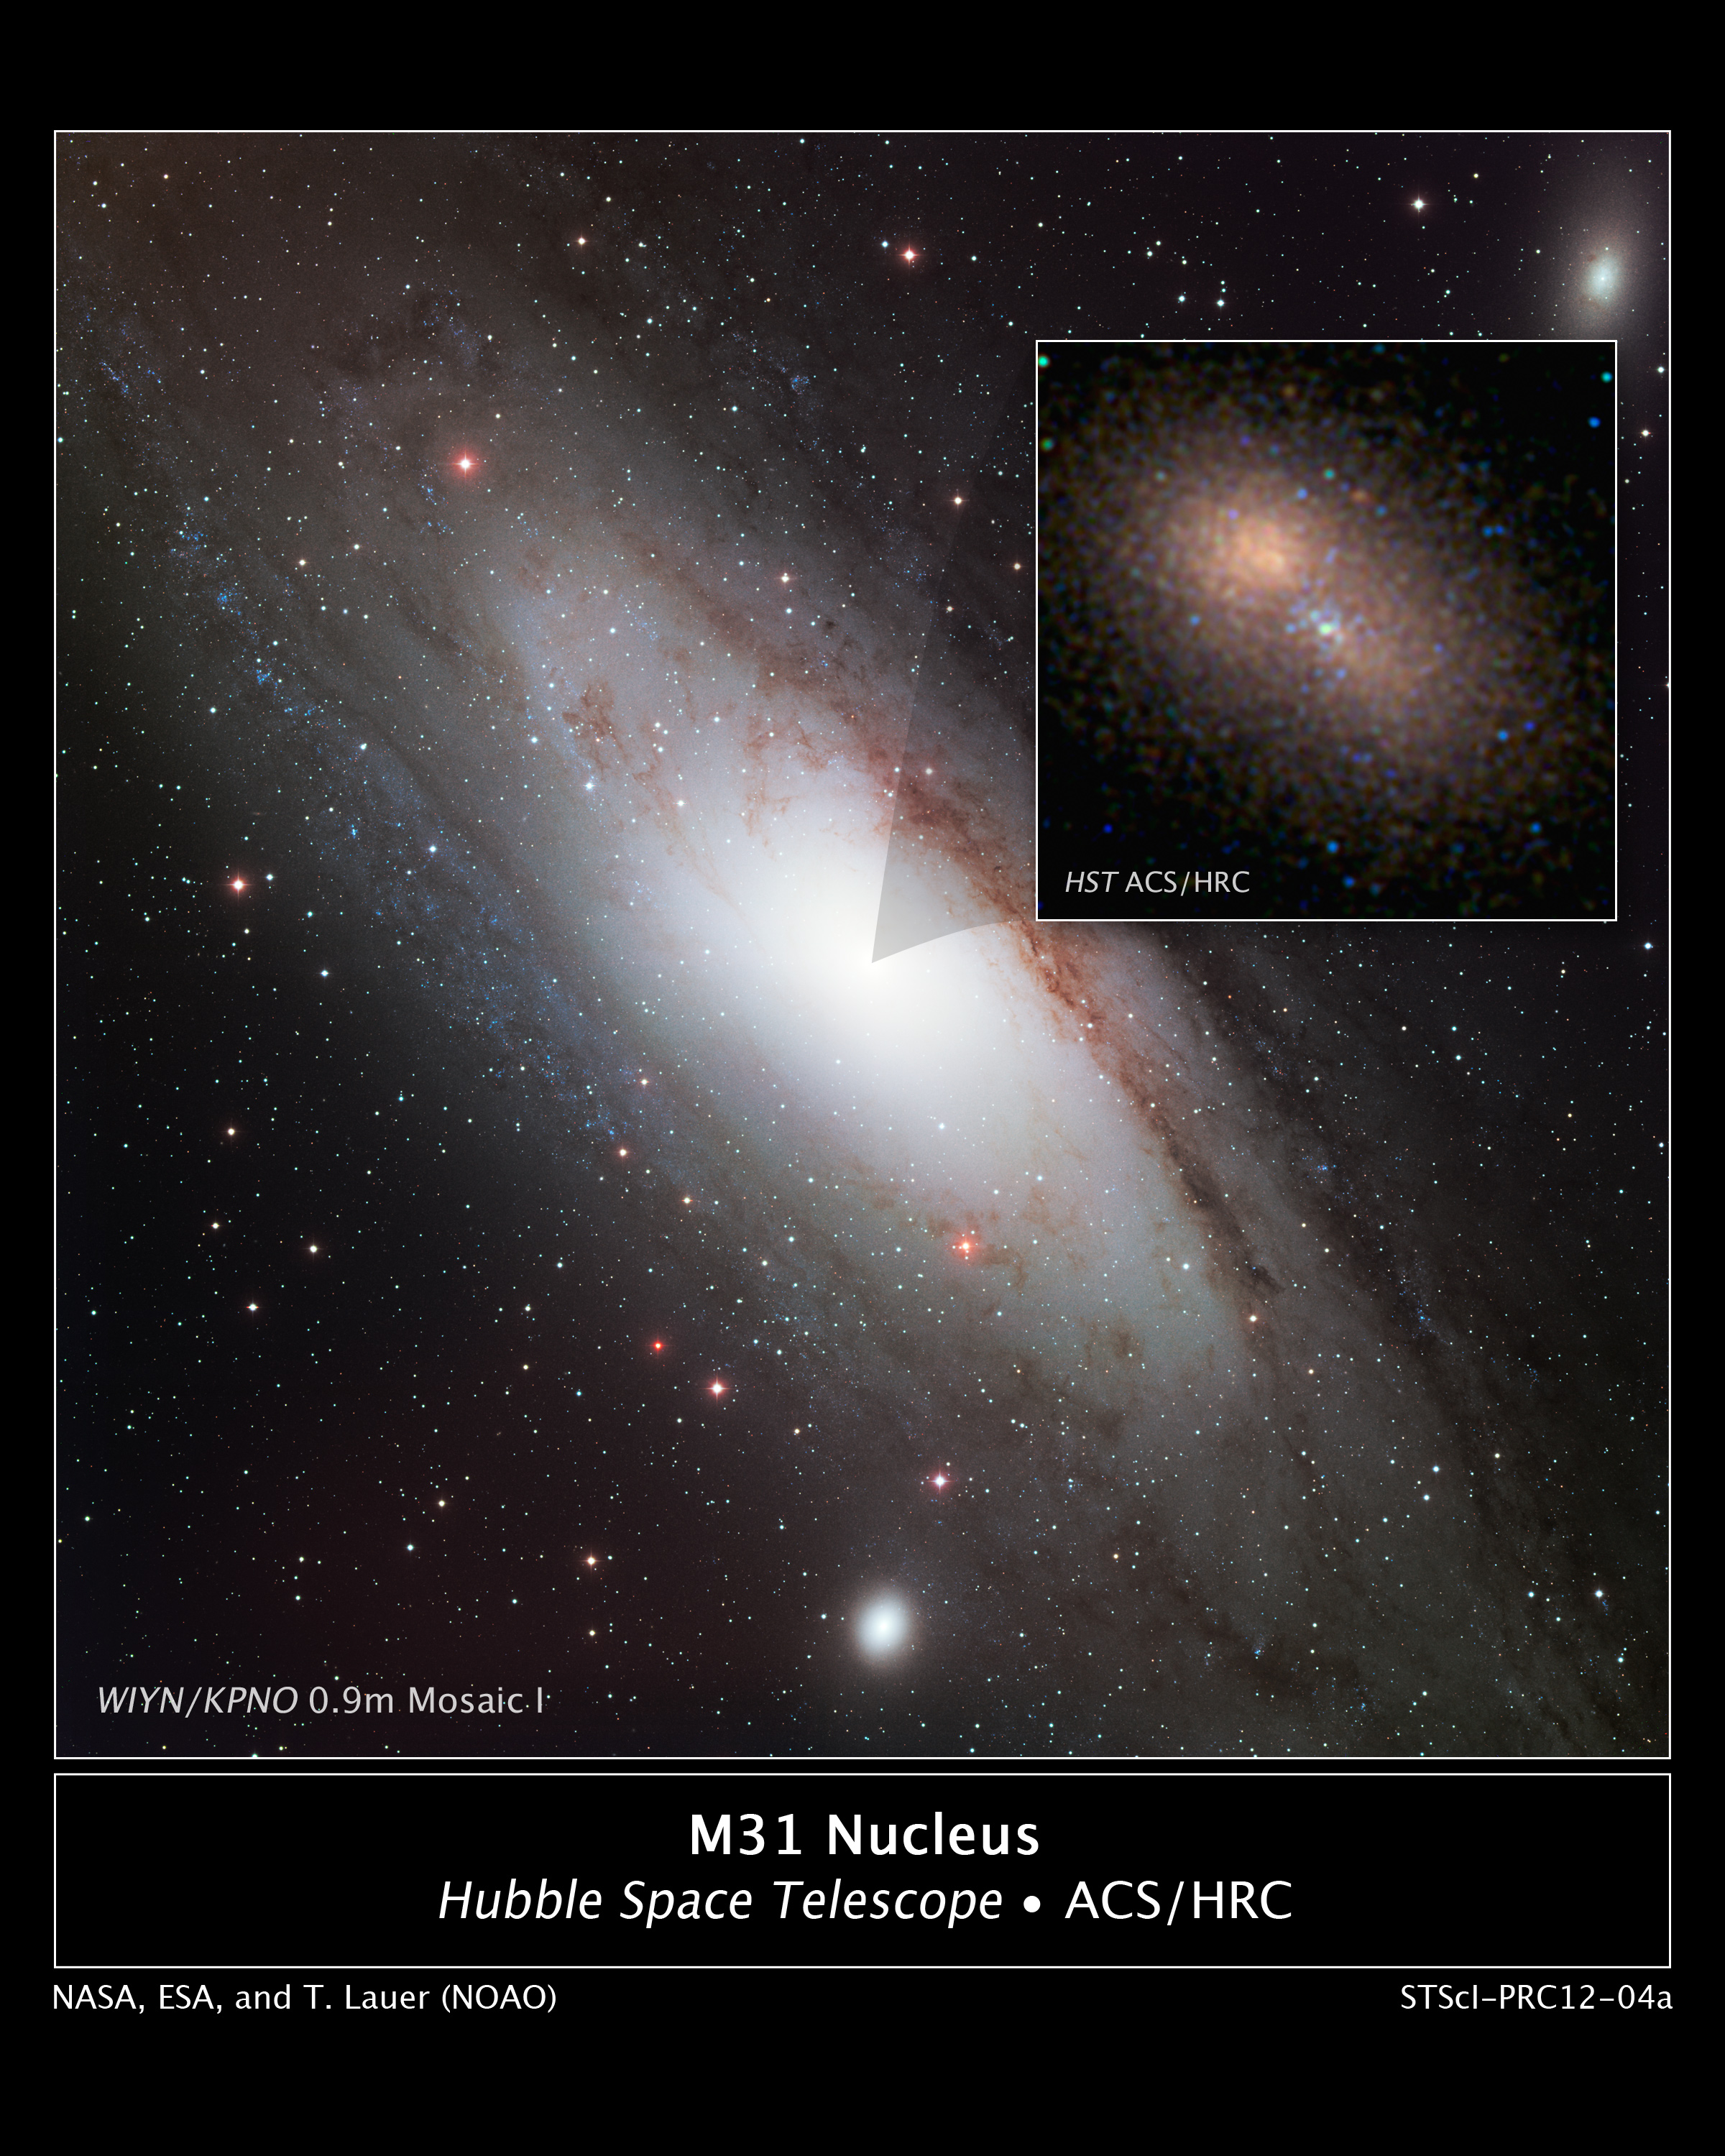

Hubble zooms in on double nucleus in Andromeda galaxy

A new Hubble Space Telescope image centres on the 100-million-solar-mass black hole at the hub of the neighbouring spiral galaxy M31, or the Andromeda galaxy, one of the few galaxies outside the Milky Way visible to the naked eye and the only other giant galaxy in the Local Group.

This is the sharpest visible-light image ever made of the nucleus of an external galaxy.

The event horizon, the closest region around the black hole where light can still escape, is too small to be seen, but it lies near the middle of a compact cluster of blue stars at the centre of the image. The compact cluster of blue stars is surrounded by the larger "double nucleus" of M31, discovered with the Hubble Space Telescope in 1992. The double nucleus is actually an elliptical ring of old reddish stars in orbit around the black hole but more distant than the blue stars. When the stars are at the farthest point in their orbit they move slower and give the illusion of a second nucleus.

The blue stars surrounding the black hole are no more than 200 million years old, and therefore must have formed near the black hole in an abrupt burst of star formation. Massive blue stars are so short-lived that they would not have enough time to migrate to the black hole if they were formed elsewhere.

Astronomers are trying to understand how apparently young stars were formed so deep inside the black hole's gravitational grip and how they survive in an extreme environment.

The fact that young stars are also closely bound to the central black hole in our Milky Way galaxy suggests this may be a common phenomenon in spiral galaxies.

Tod R. Lauer of the National Optical Astronomy Observatory in Tucson, Arizona (USA), assembled this image of the nuclear region by taking several blue and ultraviolet light exposures of the nucleus with Hubble's Advanced Camera for Surveys high-resolution channel during September 2005 and February 2006, each time slightly moving the telescope to change how the camera sampled the region. By combining these pictures, he was able to construct an ultra-sharp view of the galaxy's core.

Credit: NASA, ESA, and T. Lauer (National Optical Astronomy Observatory)